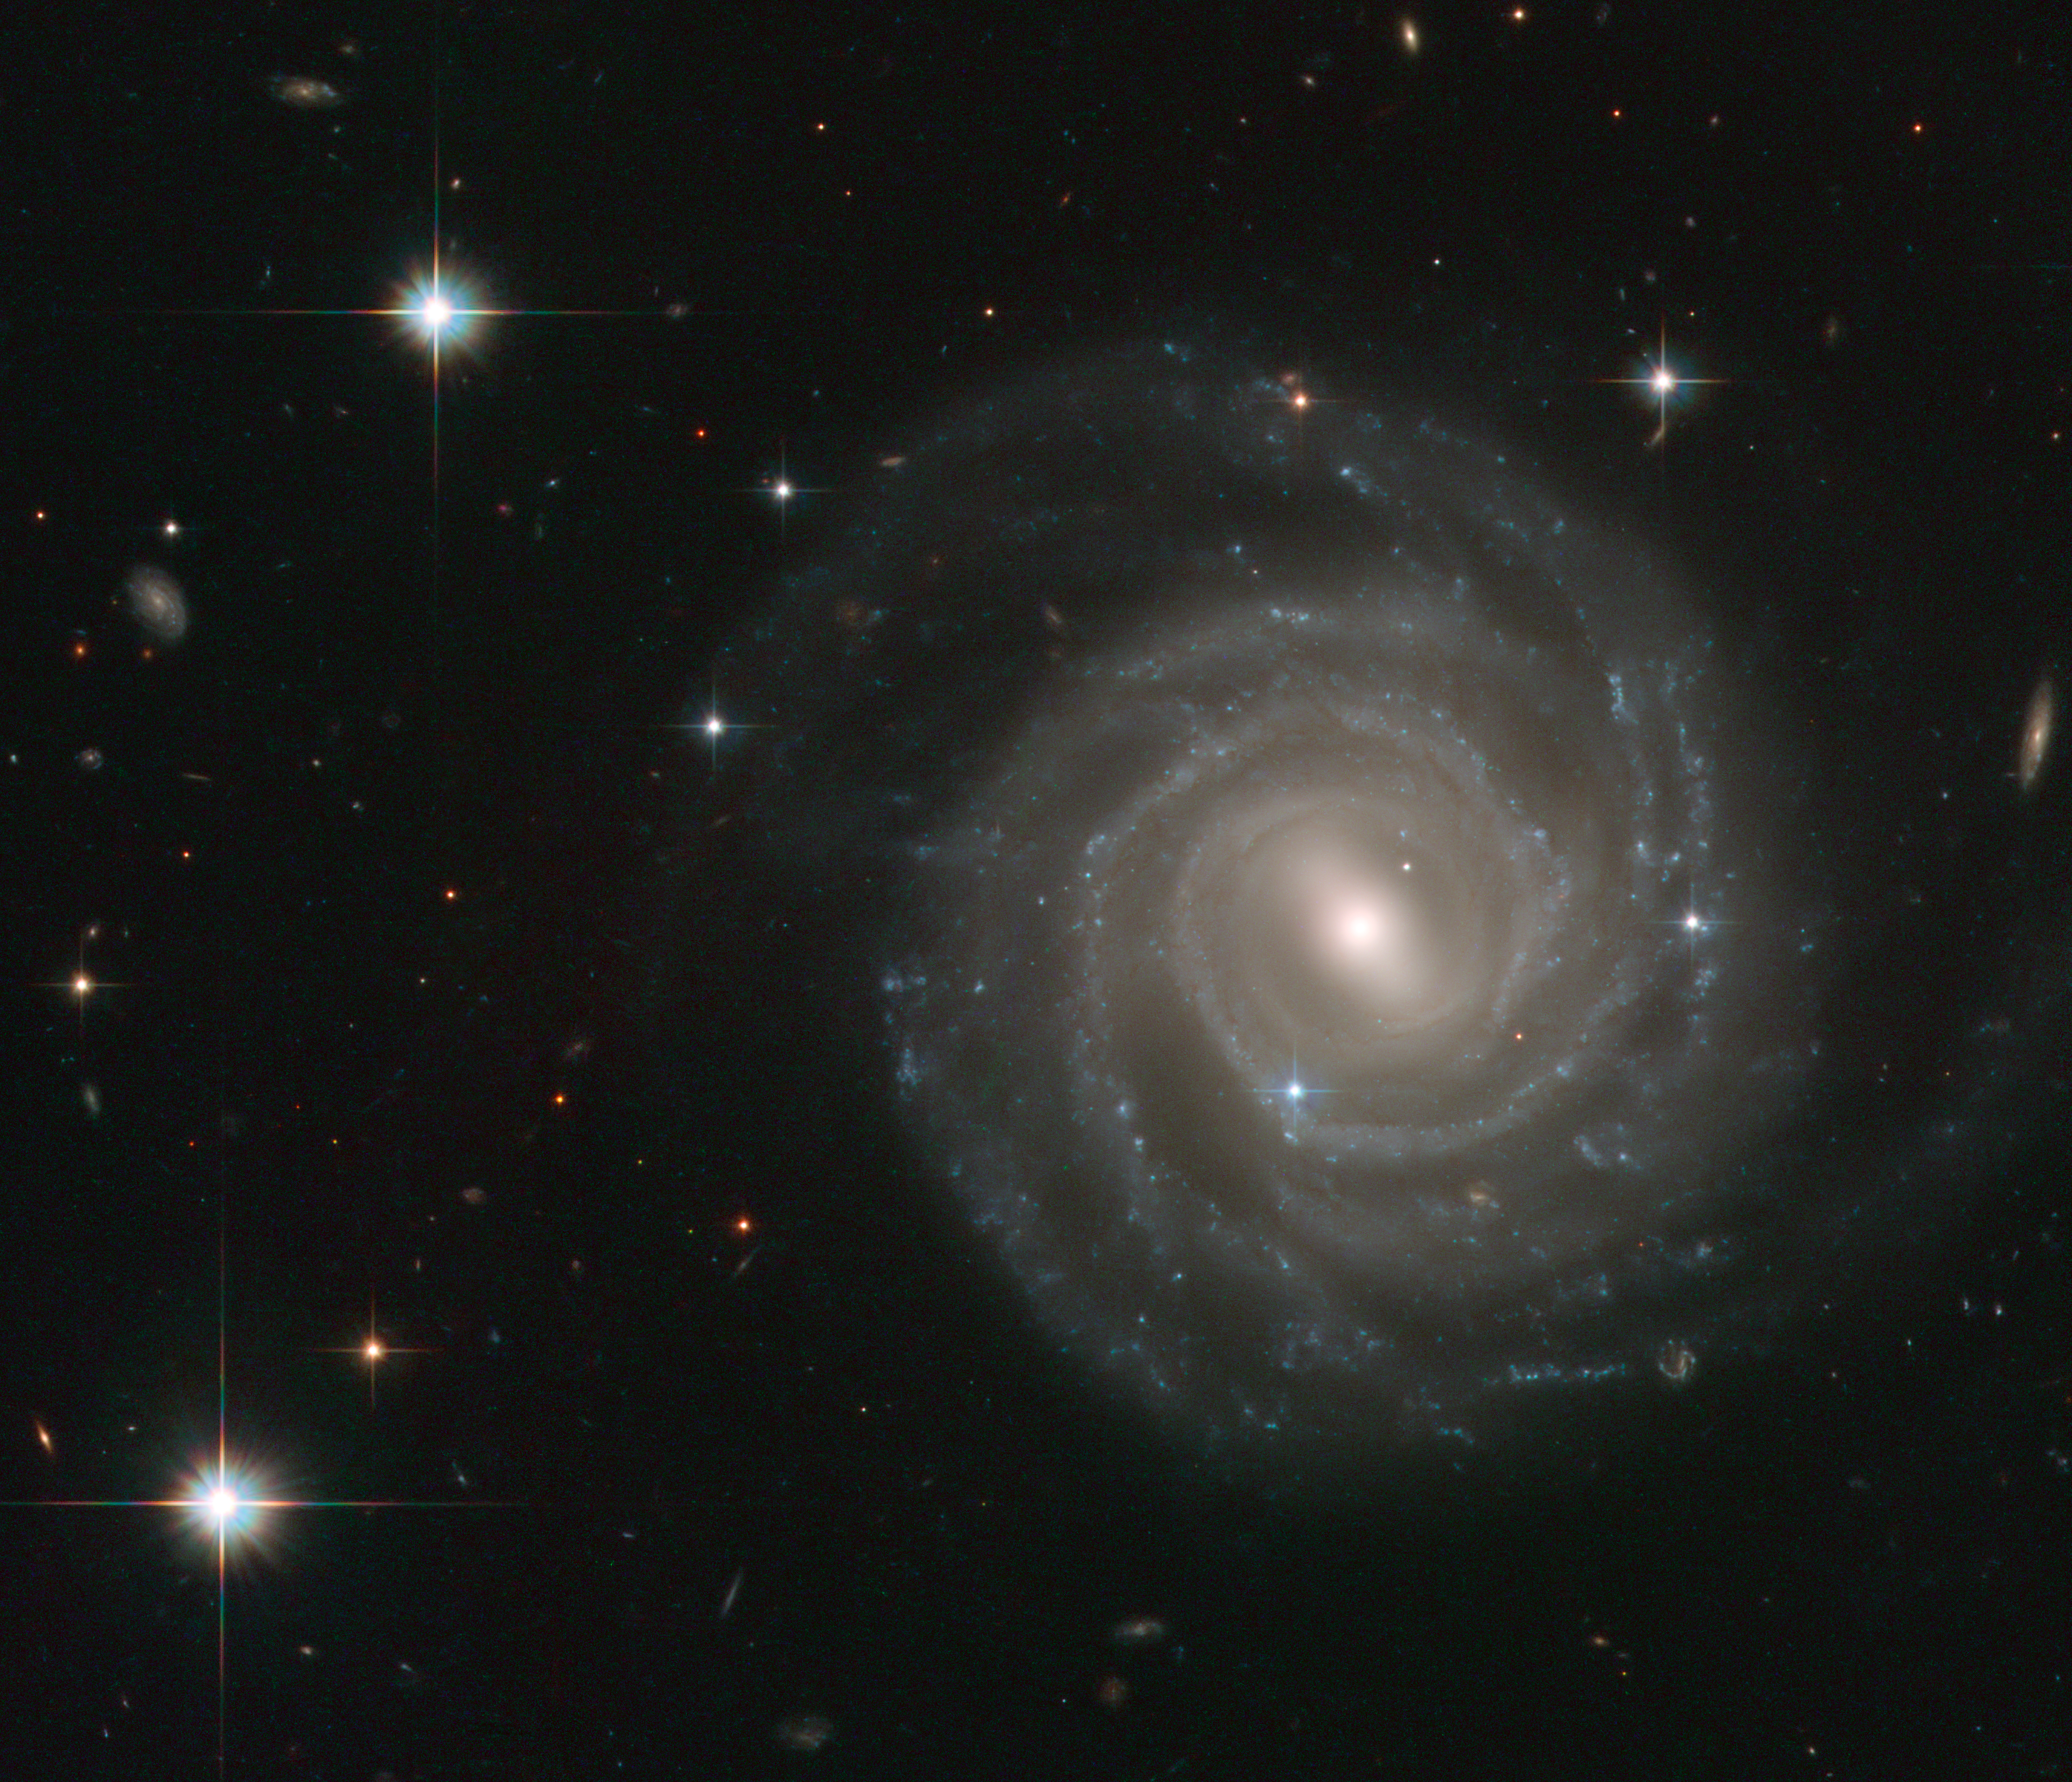

Barred spiral bares all

The galaxy captured in this image, called UGC 12158, certainly isn’t camera-shy: this spiral stunner is posing face-on to the NASA/ESA Hubble Space Telescope’s Advanced Camera for Surveys, revealing its structure in fine detail.

UGC 12158 is an excellent example of a barred spiral galaxy in the Hubble sequence — a scheme used to categorise galaxies based on their shapes. Barred spirals, as the name suggest, feature spectacular swirling arms of stars that emanate from a bar-shaped centre. Such bar structures are common, being found in about two thirds of spiral galaxies, and are thought to act as funnels, guiding gas to their galactic centres where it accumulates to form newborn stars. These aren’t permanent structures: astronomers think that they slowly disperse over time, so that the galaxies eventually evolve into regular spirals.

The appearance of a galaxy changes little over millions of years, but this image also contains a short-lived and brilliant interloper — the bright blue star just to the lower left of the centre of the galaxy is very different from the several foreground stars seen in the image. It is in fact a supernova inside UGC 12158 and much further away than the Milky Way stars in the field — at a distance of about 400 million light-years! This stellar explosion, called SN 2004ef, was first spotted by two British amateur astronomers in September 2004 and the Hubble data shown here form part of the follow-up observations.

This picture was created from images taken with the Wide Field Channel of Hubble’s Advanced Camera for Surveys. Images through blue (F475W, coloured blue), yellow (F606W, coloured green) and red (F814W, coloured red) as well as a filter that isolates the light from glowing hydrogen (F658W, also coloured red) have been included. The exposure times were 1160 s, 700 s, 700 s and 1200 s respectively. The field of view is about 2.3 arcminutes across.

Credit: ESA/Hubble & NASA